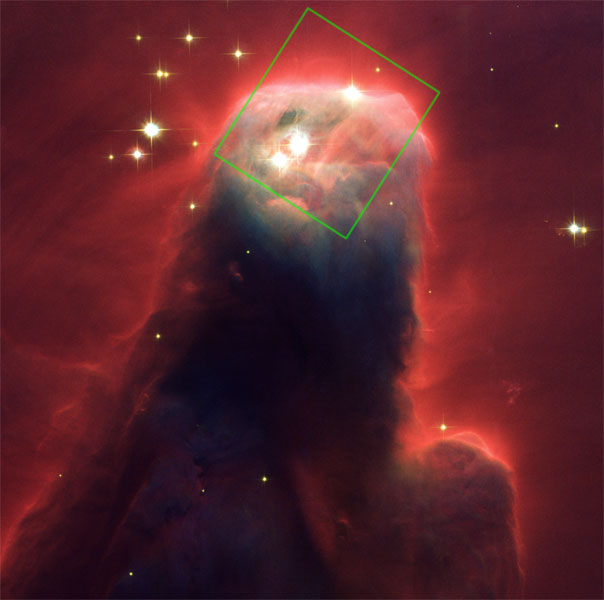

Cone Nebula

HST/ACS Visible-Light Image of the Cone Nebula With Outline of the NICMOS Infrared-Light Image.

Credit: NASA, H. Ford (JHU), G. Illingworth (UCSC/LO), M. Clampin (STScI), G. Hartig (STScI), the ACS Science Team and ESA